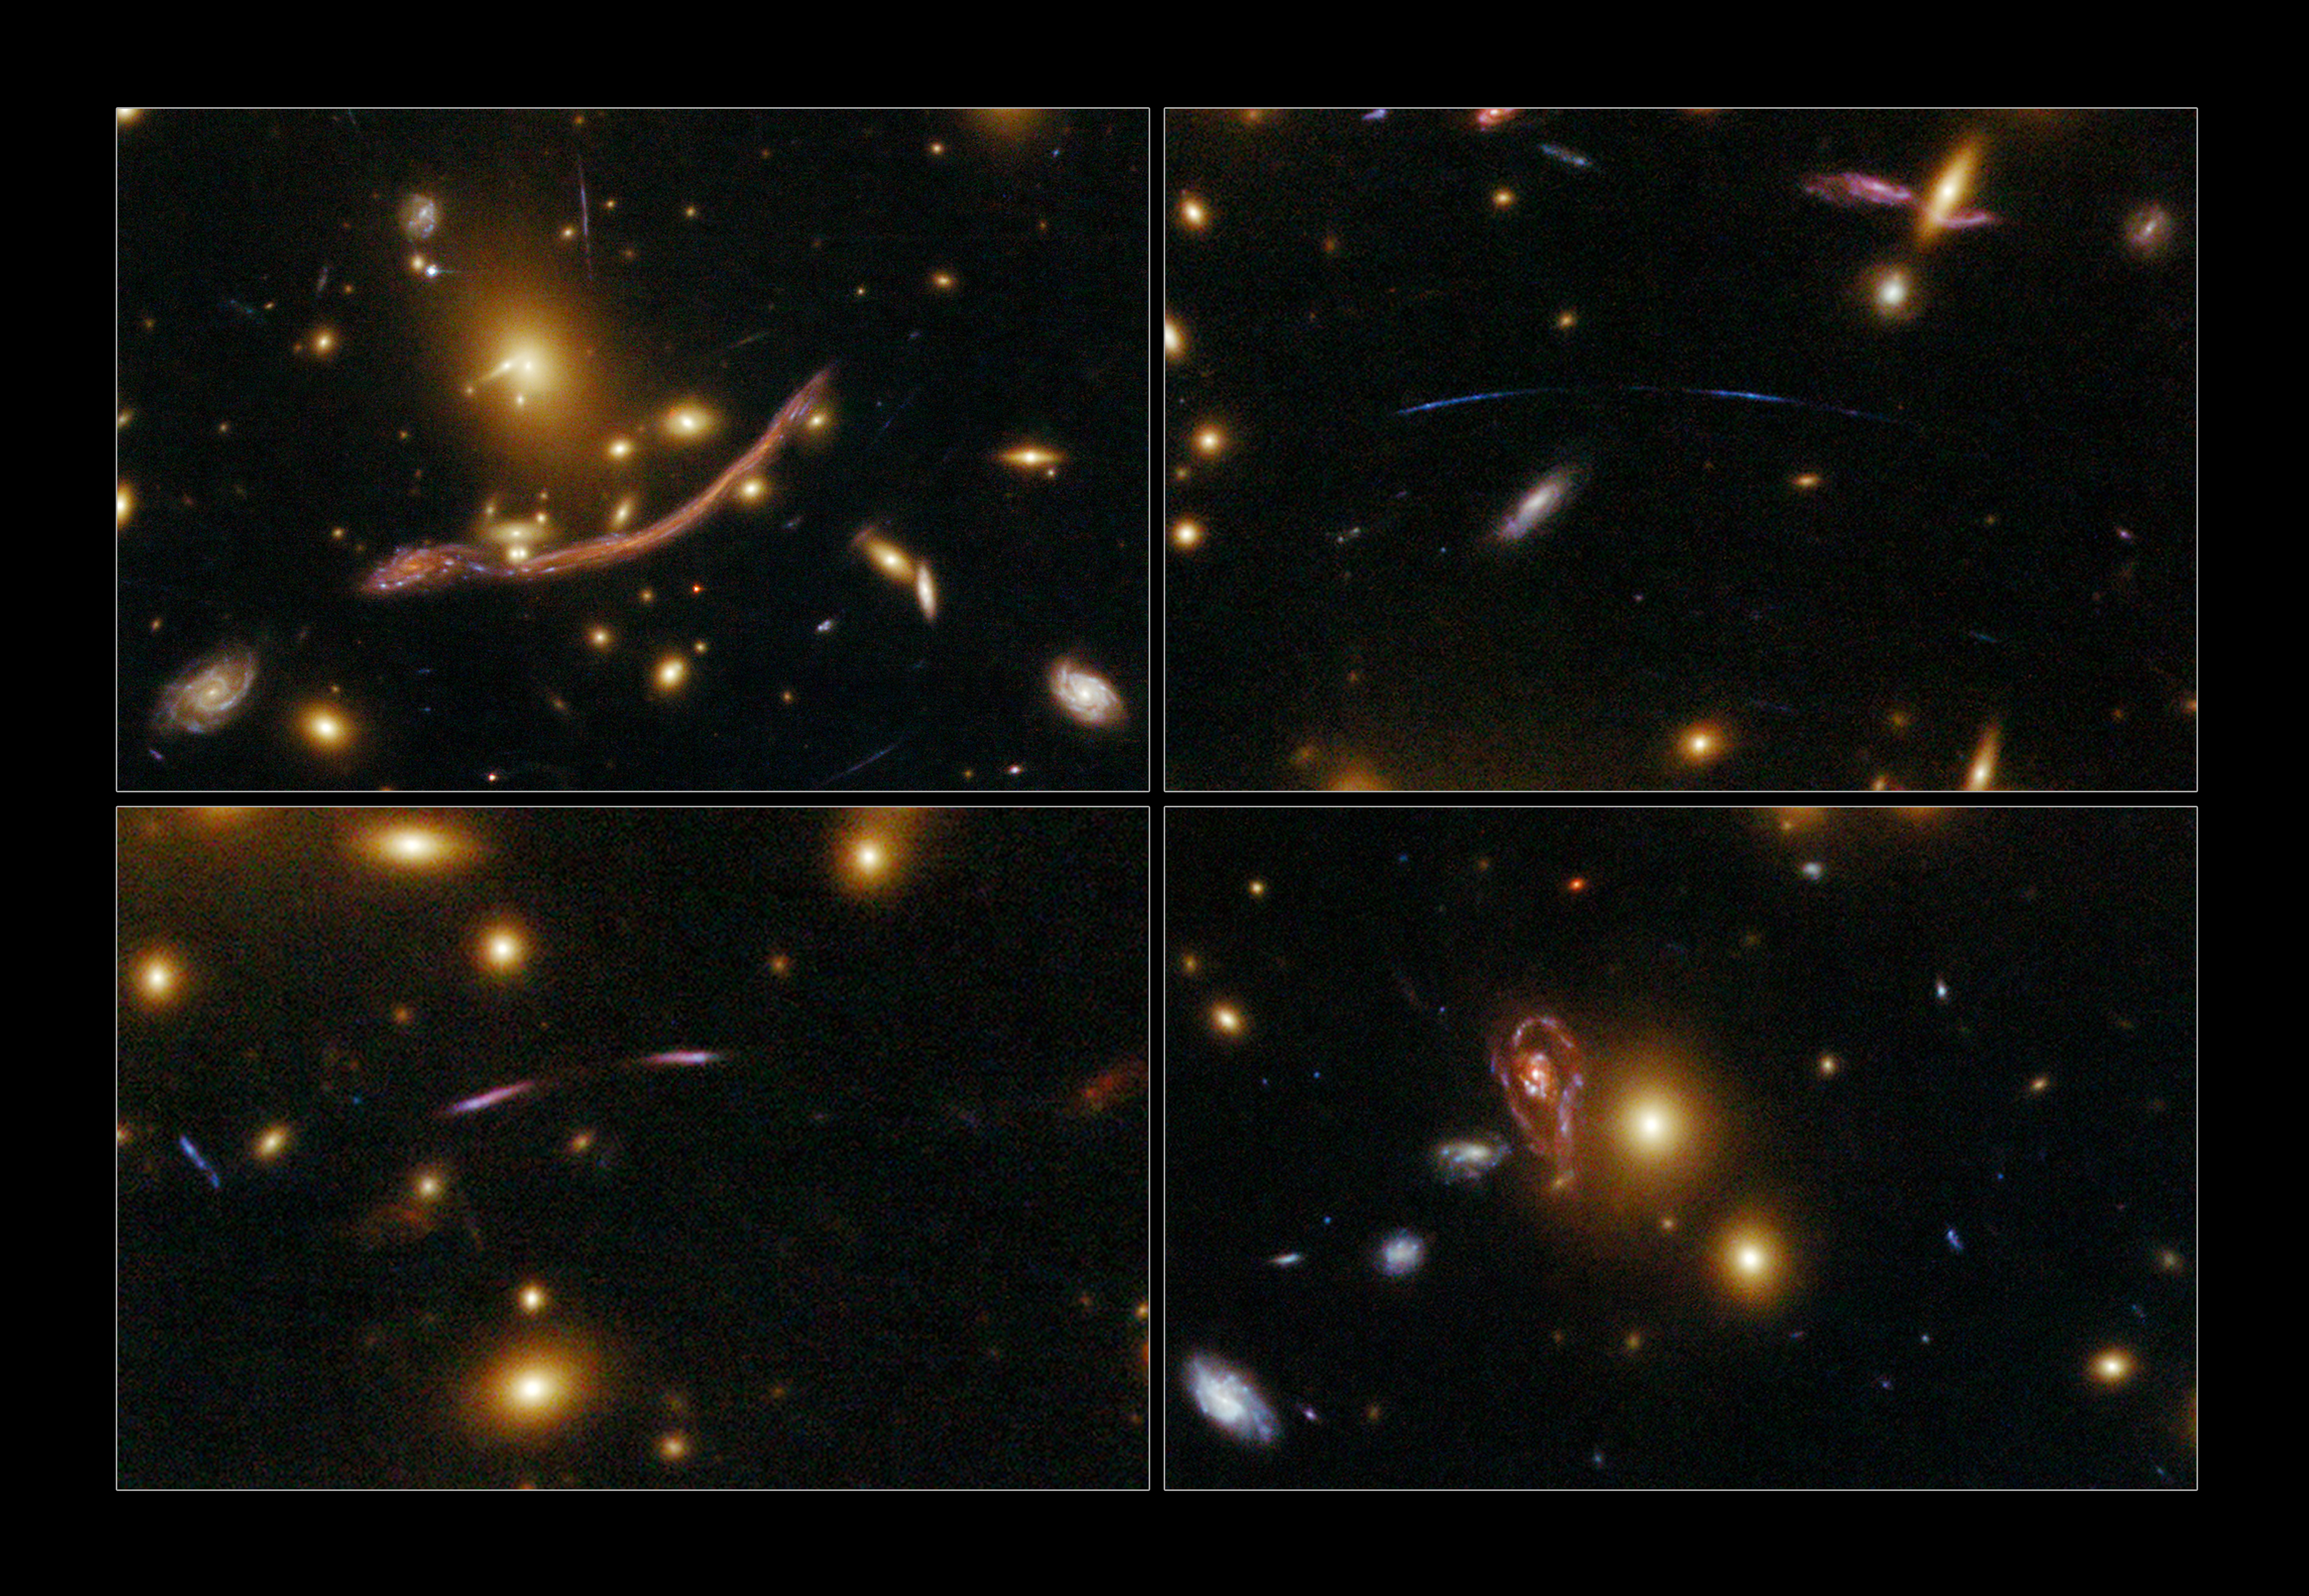

4-panel Abell 370

This image highlights the phenomenon of gravitational lensing in the galaxy cluster Abell 370.

The NASA/ESA Hubble Space Telescope's newly repaired Advanced Camera for Surveys (ACS) has peered across almost five billion light-years to resolve intricate details in the galaxy cluster Abell 370. Abell 370 is one of the very first galaxy clusters where astronomers observed the phenomenon of gravitational lensing, the warping of space-time by the cluster's gravitational field that distorts the light from galaxies lying far behind it. This is manifested as arcs and streaks in the picture, which are the stretched images of background galaxies.

Gravitational lensing is a vital tool for astronomers when measuring the dark matter distribution in massive clusters, since the mass distribution can be reconstructed from observations of its gravitational effects.

These observations were taken with Hubble's Advanced Camera for Surveys (ACS) in its Wide Field mode on 16 July 2009. The composite image was made using filters that isolate light from green, red and infrared wavelengths. These Hubble data are part of the Hubble Servicing Mission 4 Early Release Observations.

Credit: NASA, ESA, the Hubble SM4 ERO Team and ST-ECF